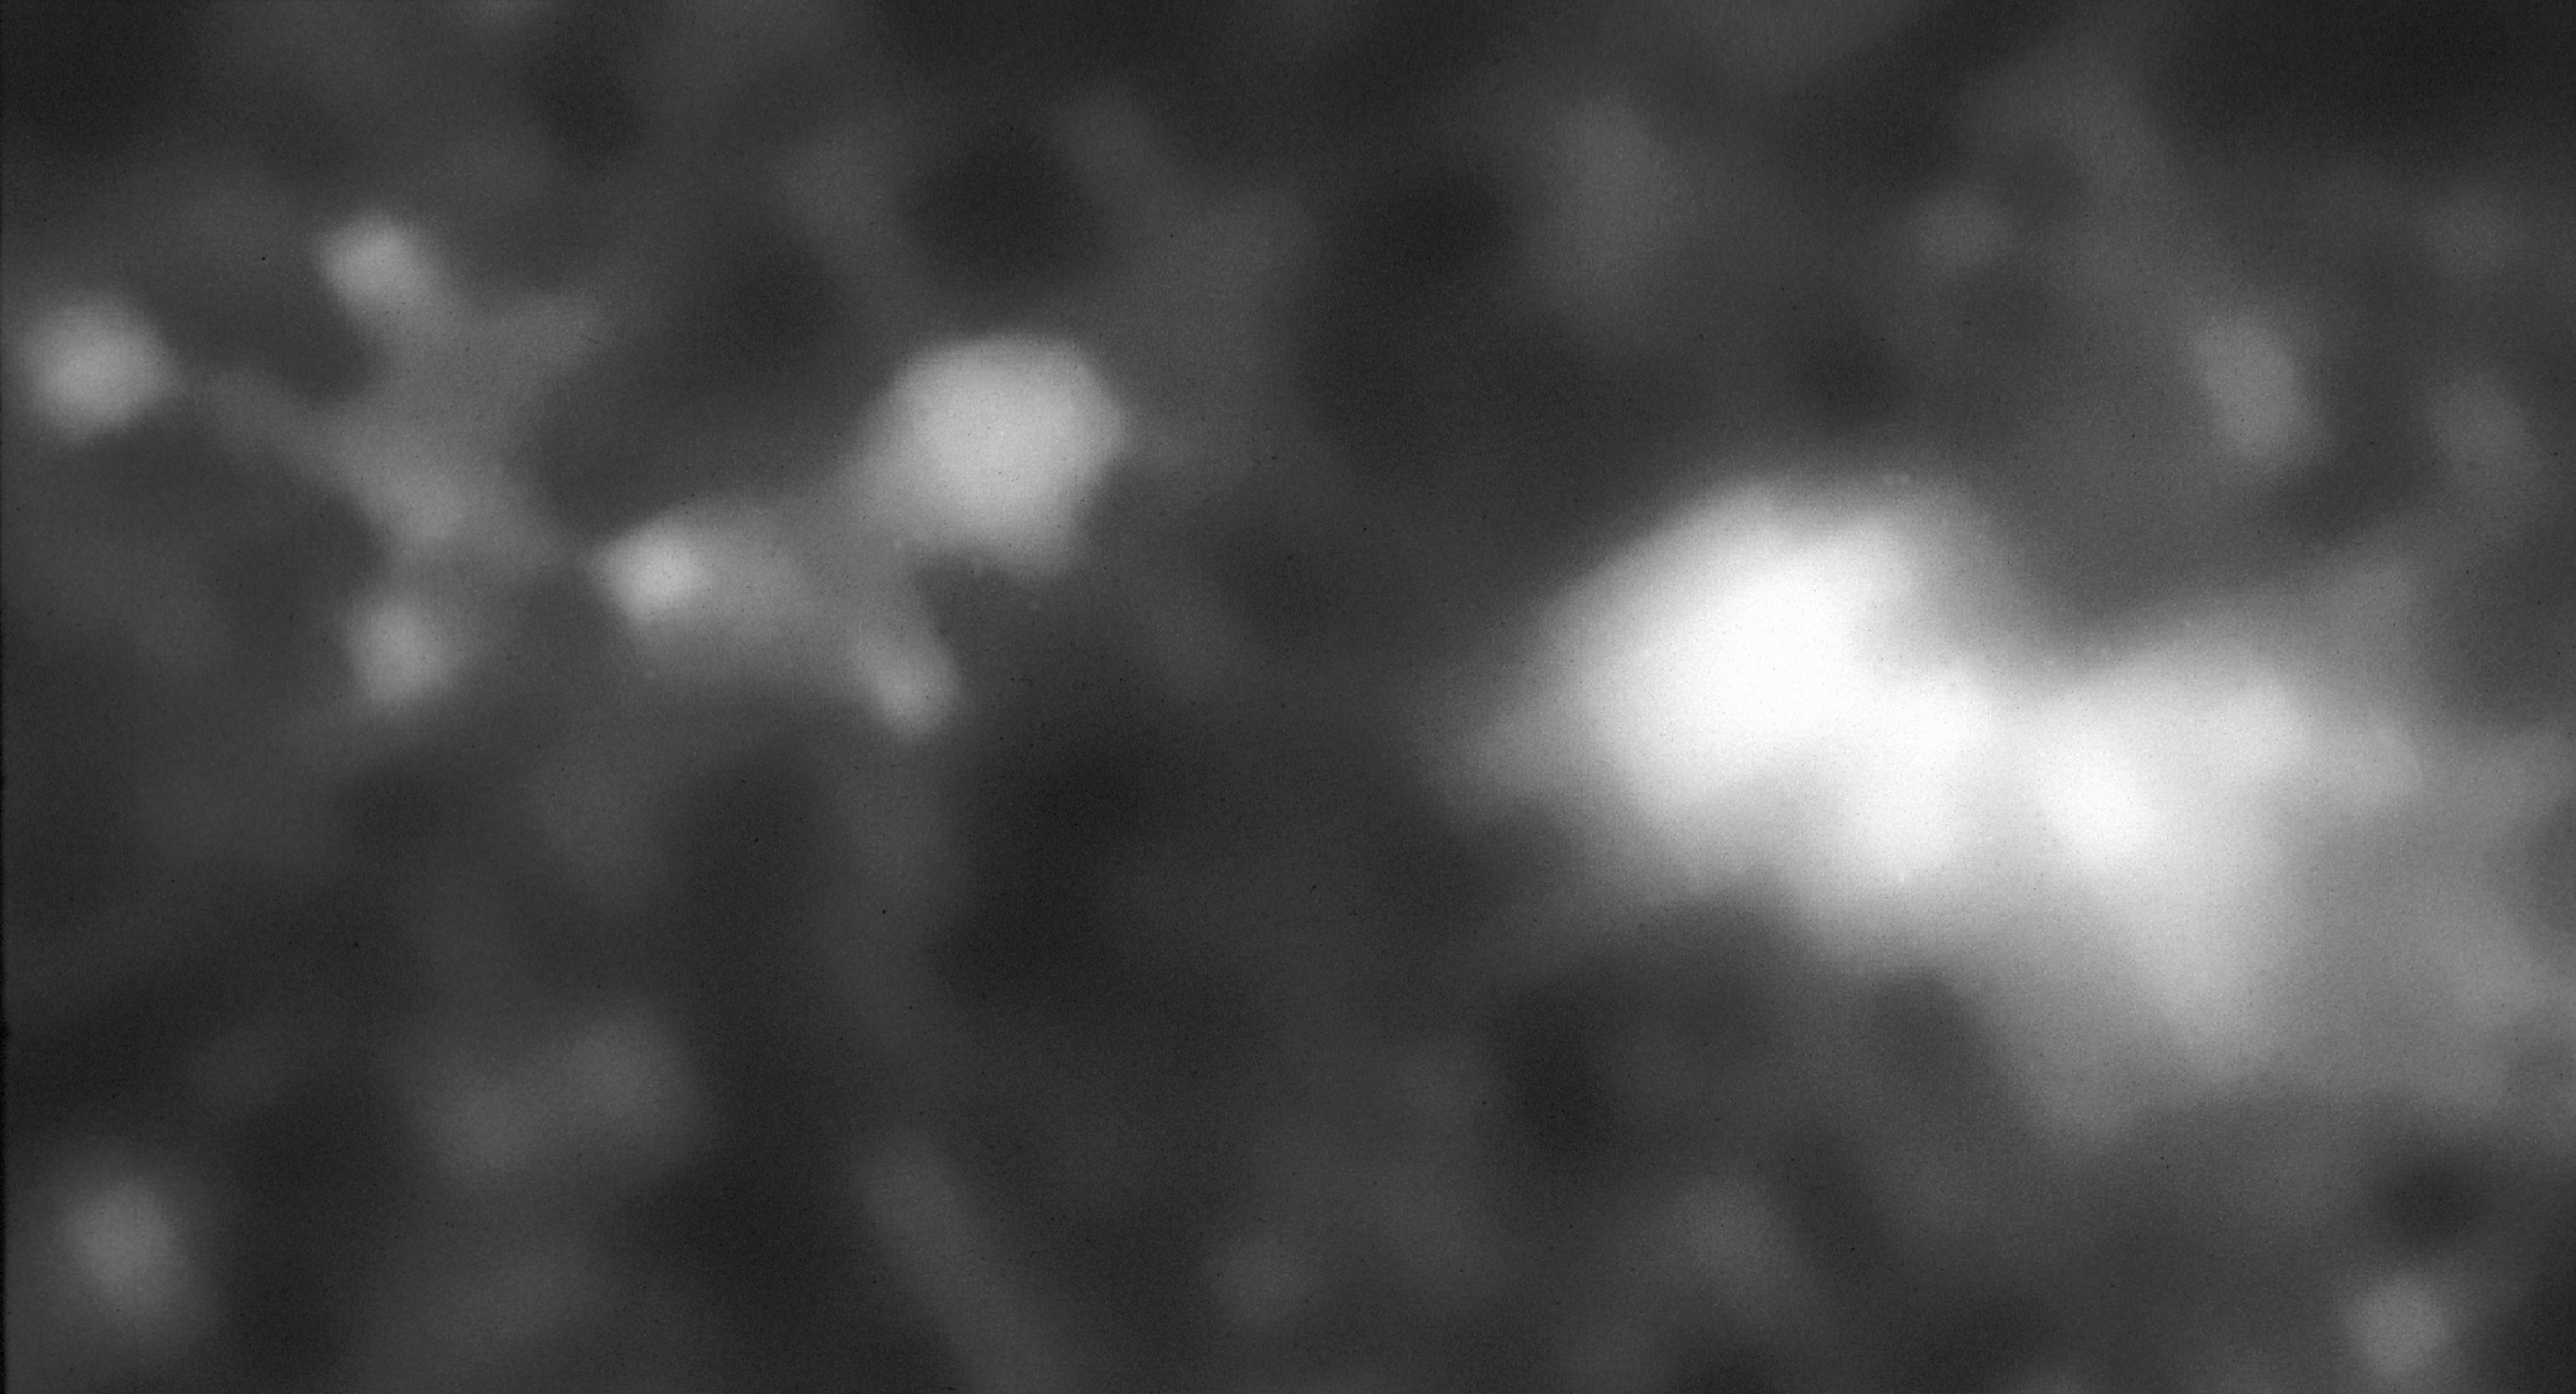

Radio galaxy 4C41.17

Using NASA/ESA Hubble Space Telescope an international team of astronomers is uncovering intriguing new details about the most distant galaxy known, located more than ten billion light-years away.

Credit: Netherlands Organization for the Advancement of Pure Research, the Space Telescope Science Institute, the European Space Agency, NASA/ESA, the European Economic Community, NATO, and the U.S. Department of Energy.